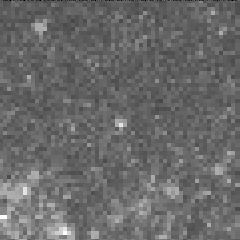

Cepheid variable star in galaxy M100

The interval it takes for the Cepheid to complete one pulsation is a direct indication of the stars's intrinsic brightness. This value can be used to make a precise measurement of the galaxy's distance, which turns out to be 56 million light-years from Earth. This image was taken on May 4, 1994.

Credit: Dr. Wendy L. Freedman, Observatories of the Carnegie Institution of Washington, and NASA/ESA